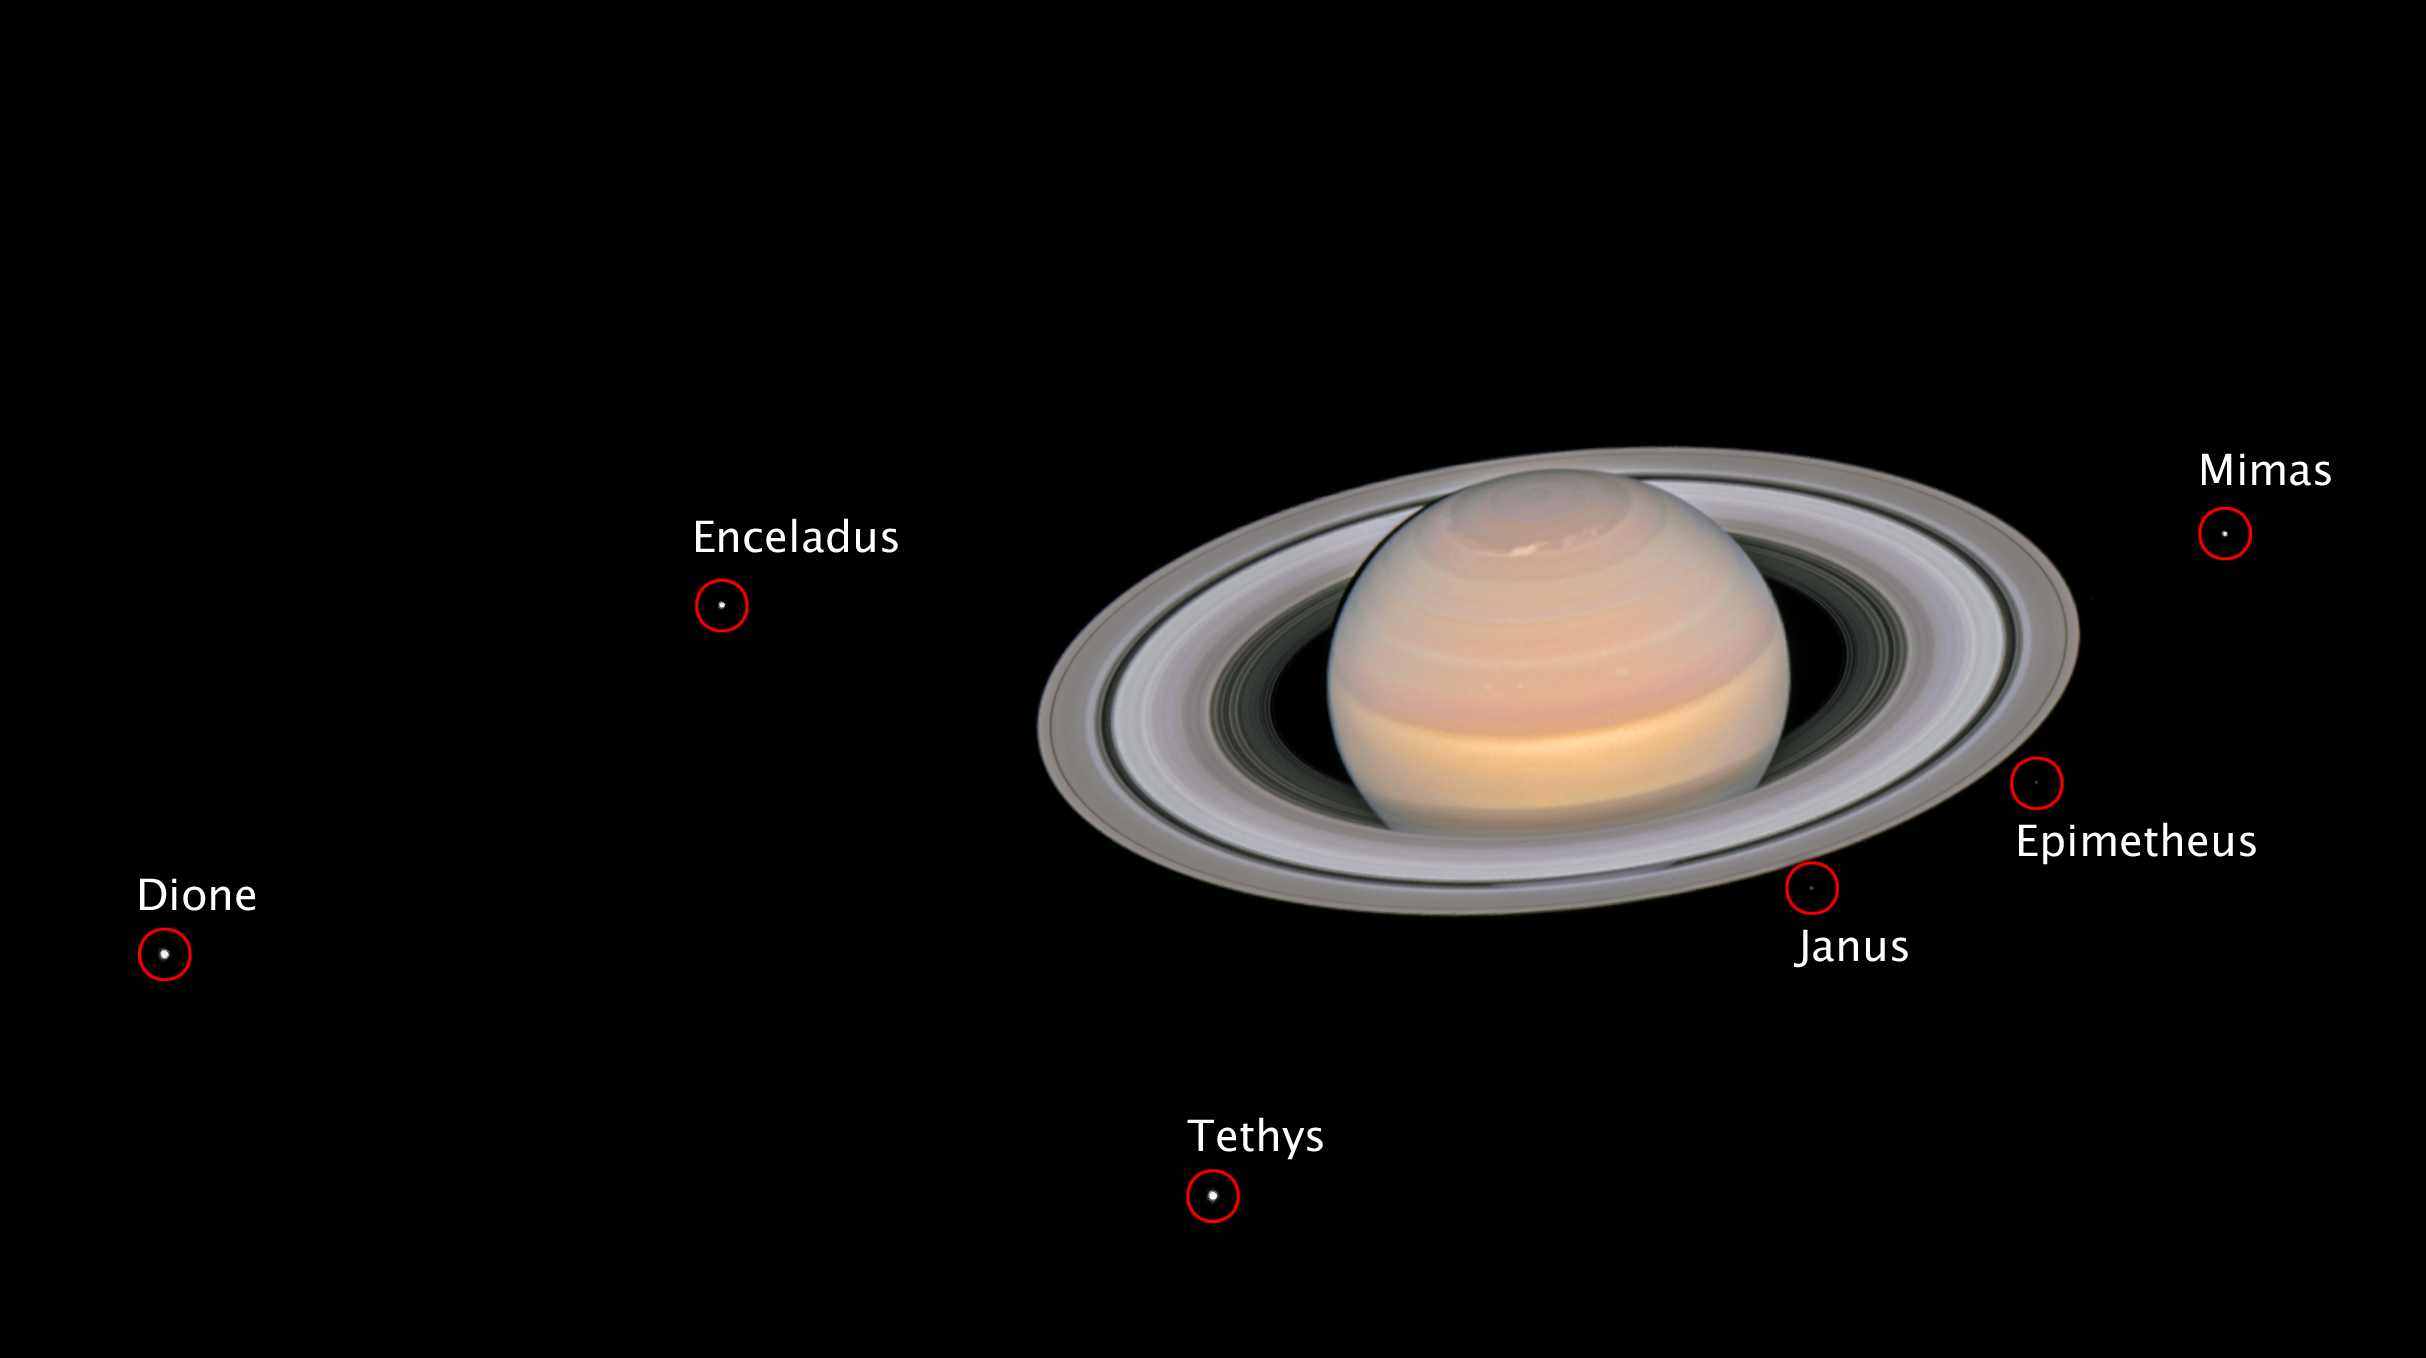

The moons of Saturn (annotated)

This composite image, taken by the NASA/ESA Hubble Space Telescope on 6 June 2018, shows the ringed planet Saturn with six of its 62 known moons.

With a diameter of 1123 kilometres, Dione is the fourth-largest of Saturn’s moons and the largest of the siblings in this family portrait. The smallest satellite in this picture is the irregularly shaped Epimetheus, with a size of 143 x 108 x 98 kilometres.

The image is a composite because the moons move during the Saturn exposures, and individual frames must be realigned to make a colour portrait.

Credit: NASA, ESA, A. Simon (GSFC) and the OPAL Team, and J. DePasquale (STScI)